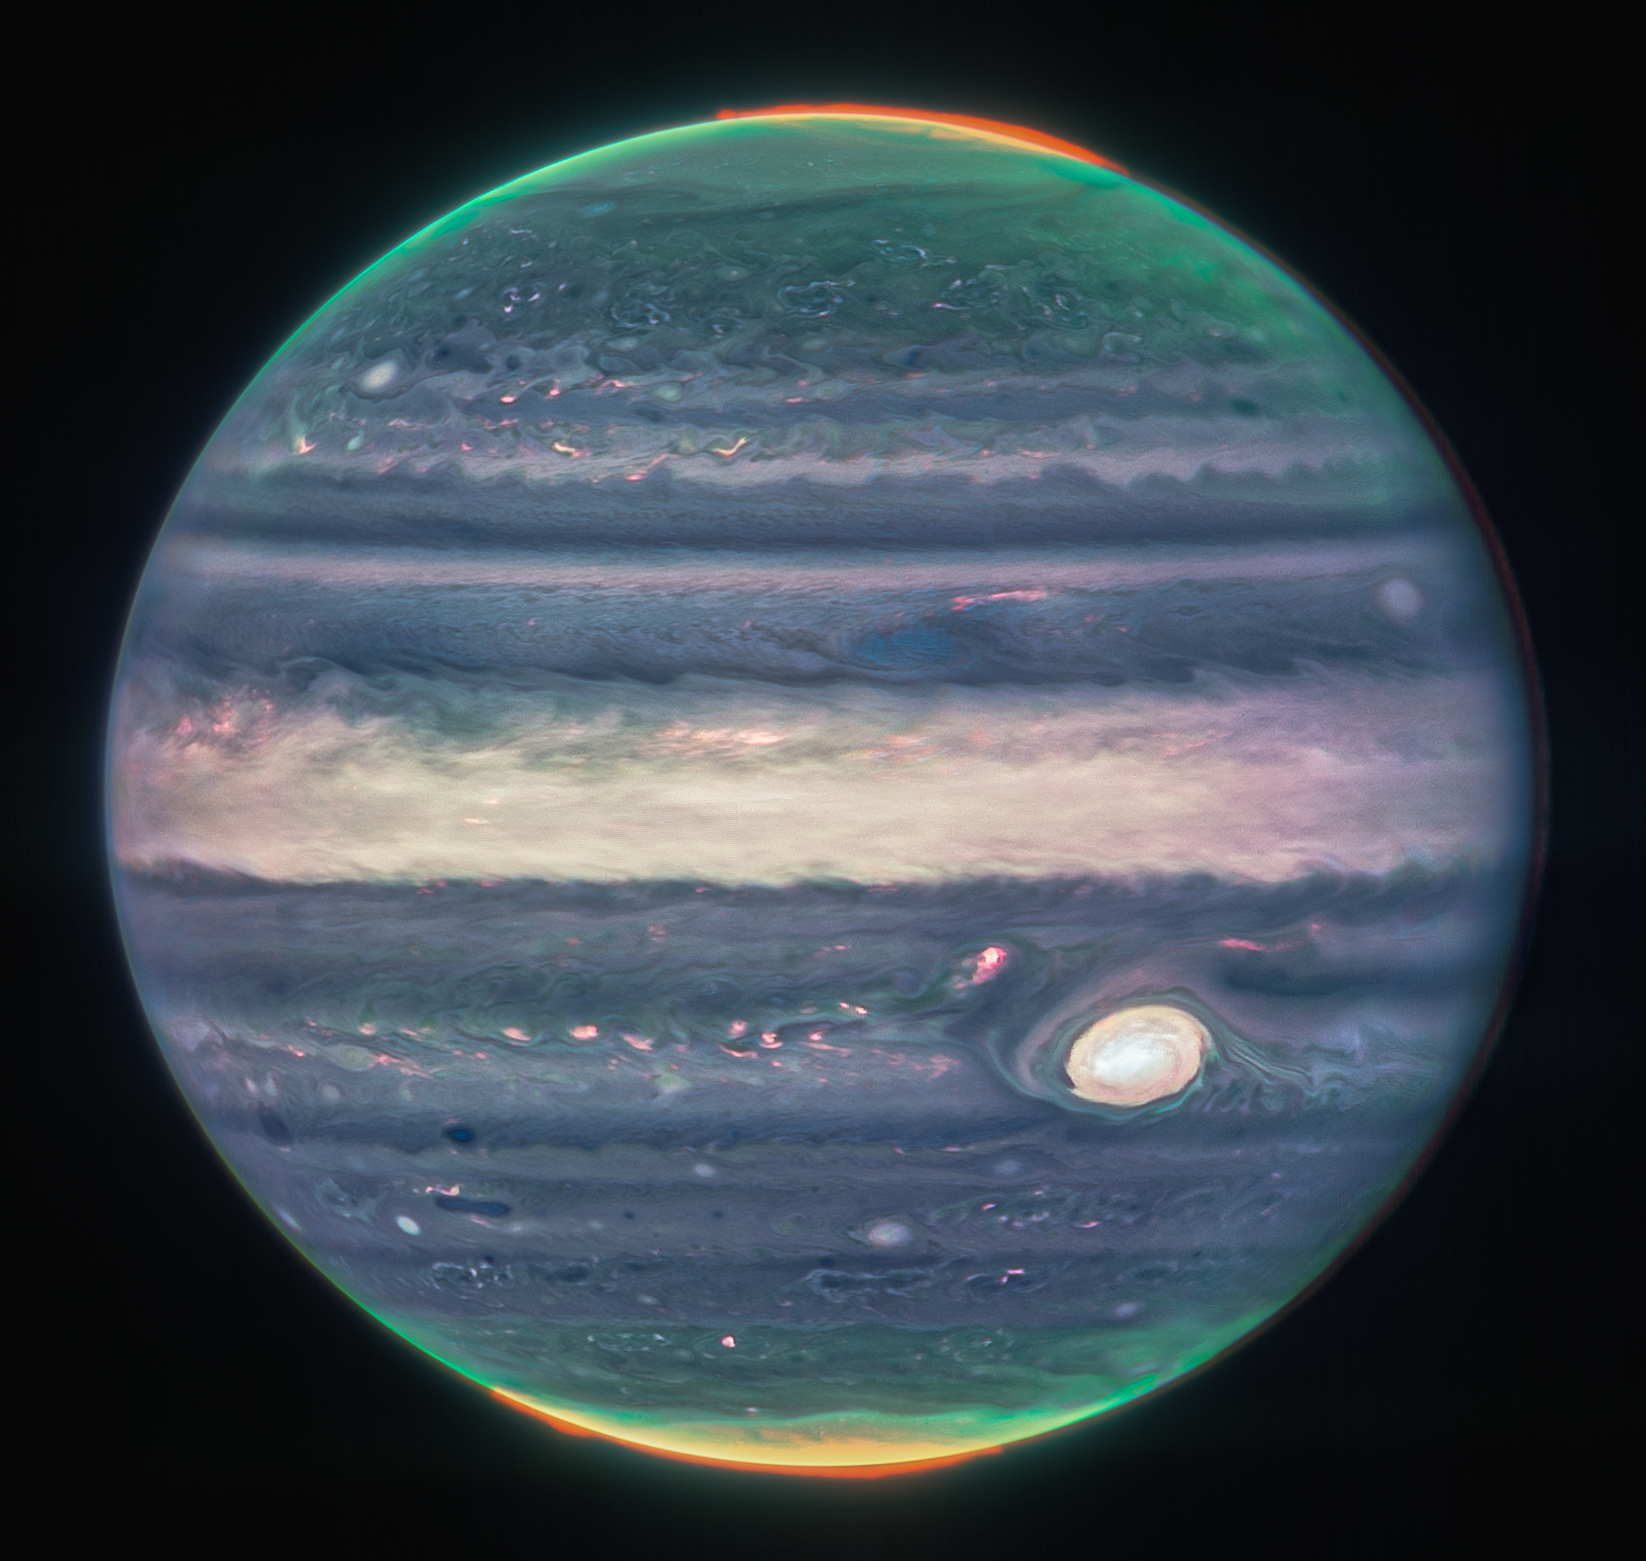

Jupiter Showcases Auroras, Hazes (NIRCam Closeup)

With giant storms, powerful winds, auroras, and extreme temperature and pressure conditions, Jupiter has a lot going on. Now, the NASA/ESA/CSA James Webb Space Telescope has captured new images of the planet. Webb’s Jupiter observations will give scientists even more clues to Jupiter’s inner life.

This image comes from the observatory’s Near-Infrared Camera (NIRCam), which has three specialized infrared filters that showcase details of the planet. Since infrared light is invisible to the human eye, the light has been mapped onto the visible spectrum. Generally, the longest wavelengths appear redder and the shortest wavelengths are shown as more blue. Scientists collaborated with citizen scientist Judy Schmidt to translate the Webb data into images.

This image was created from a composite of several images from Webb. Visible auroras extend to high altitudes above both the northern and southern poles of Jupiter. The auroras shine in a filter that is mapped to redder colors, which also highlights light reflected from lower clouds and upper hazes. A different filter, mapped to yellows and greens, shows hazes swirling around the northern and southern poles. A third filter, mapped to blues, showcases light that is reflected from a deeper main cloud. The Great Red Spot, a famous storm so big it could swallow Earth, appears white in these views, as do other clouds, because they are reflecting a lot of sunlight.

Credit: NASA, ESA, Jupiter ERS Team; image processing by Judy Schmidt